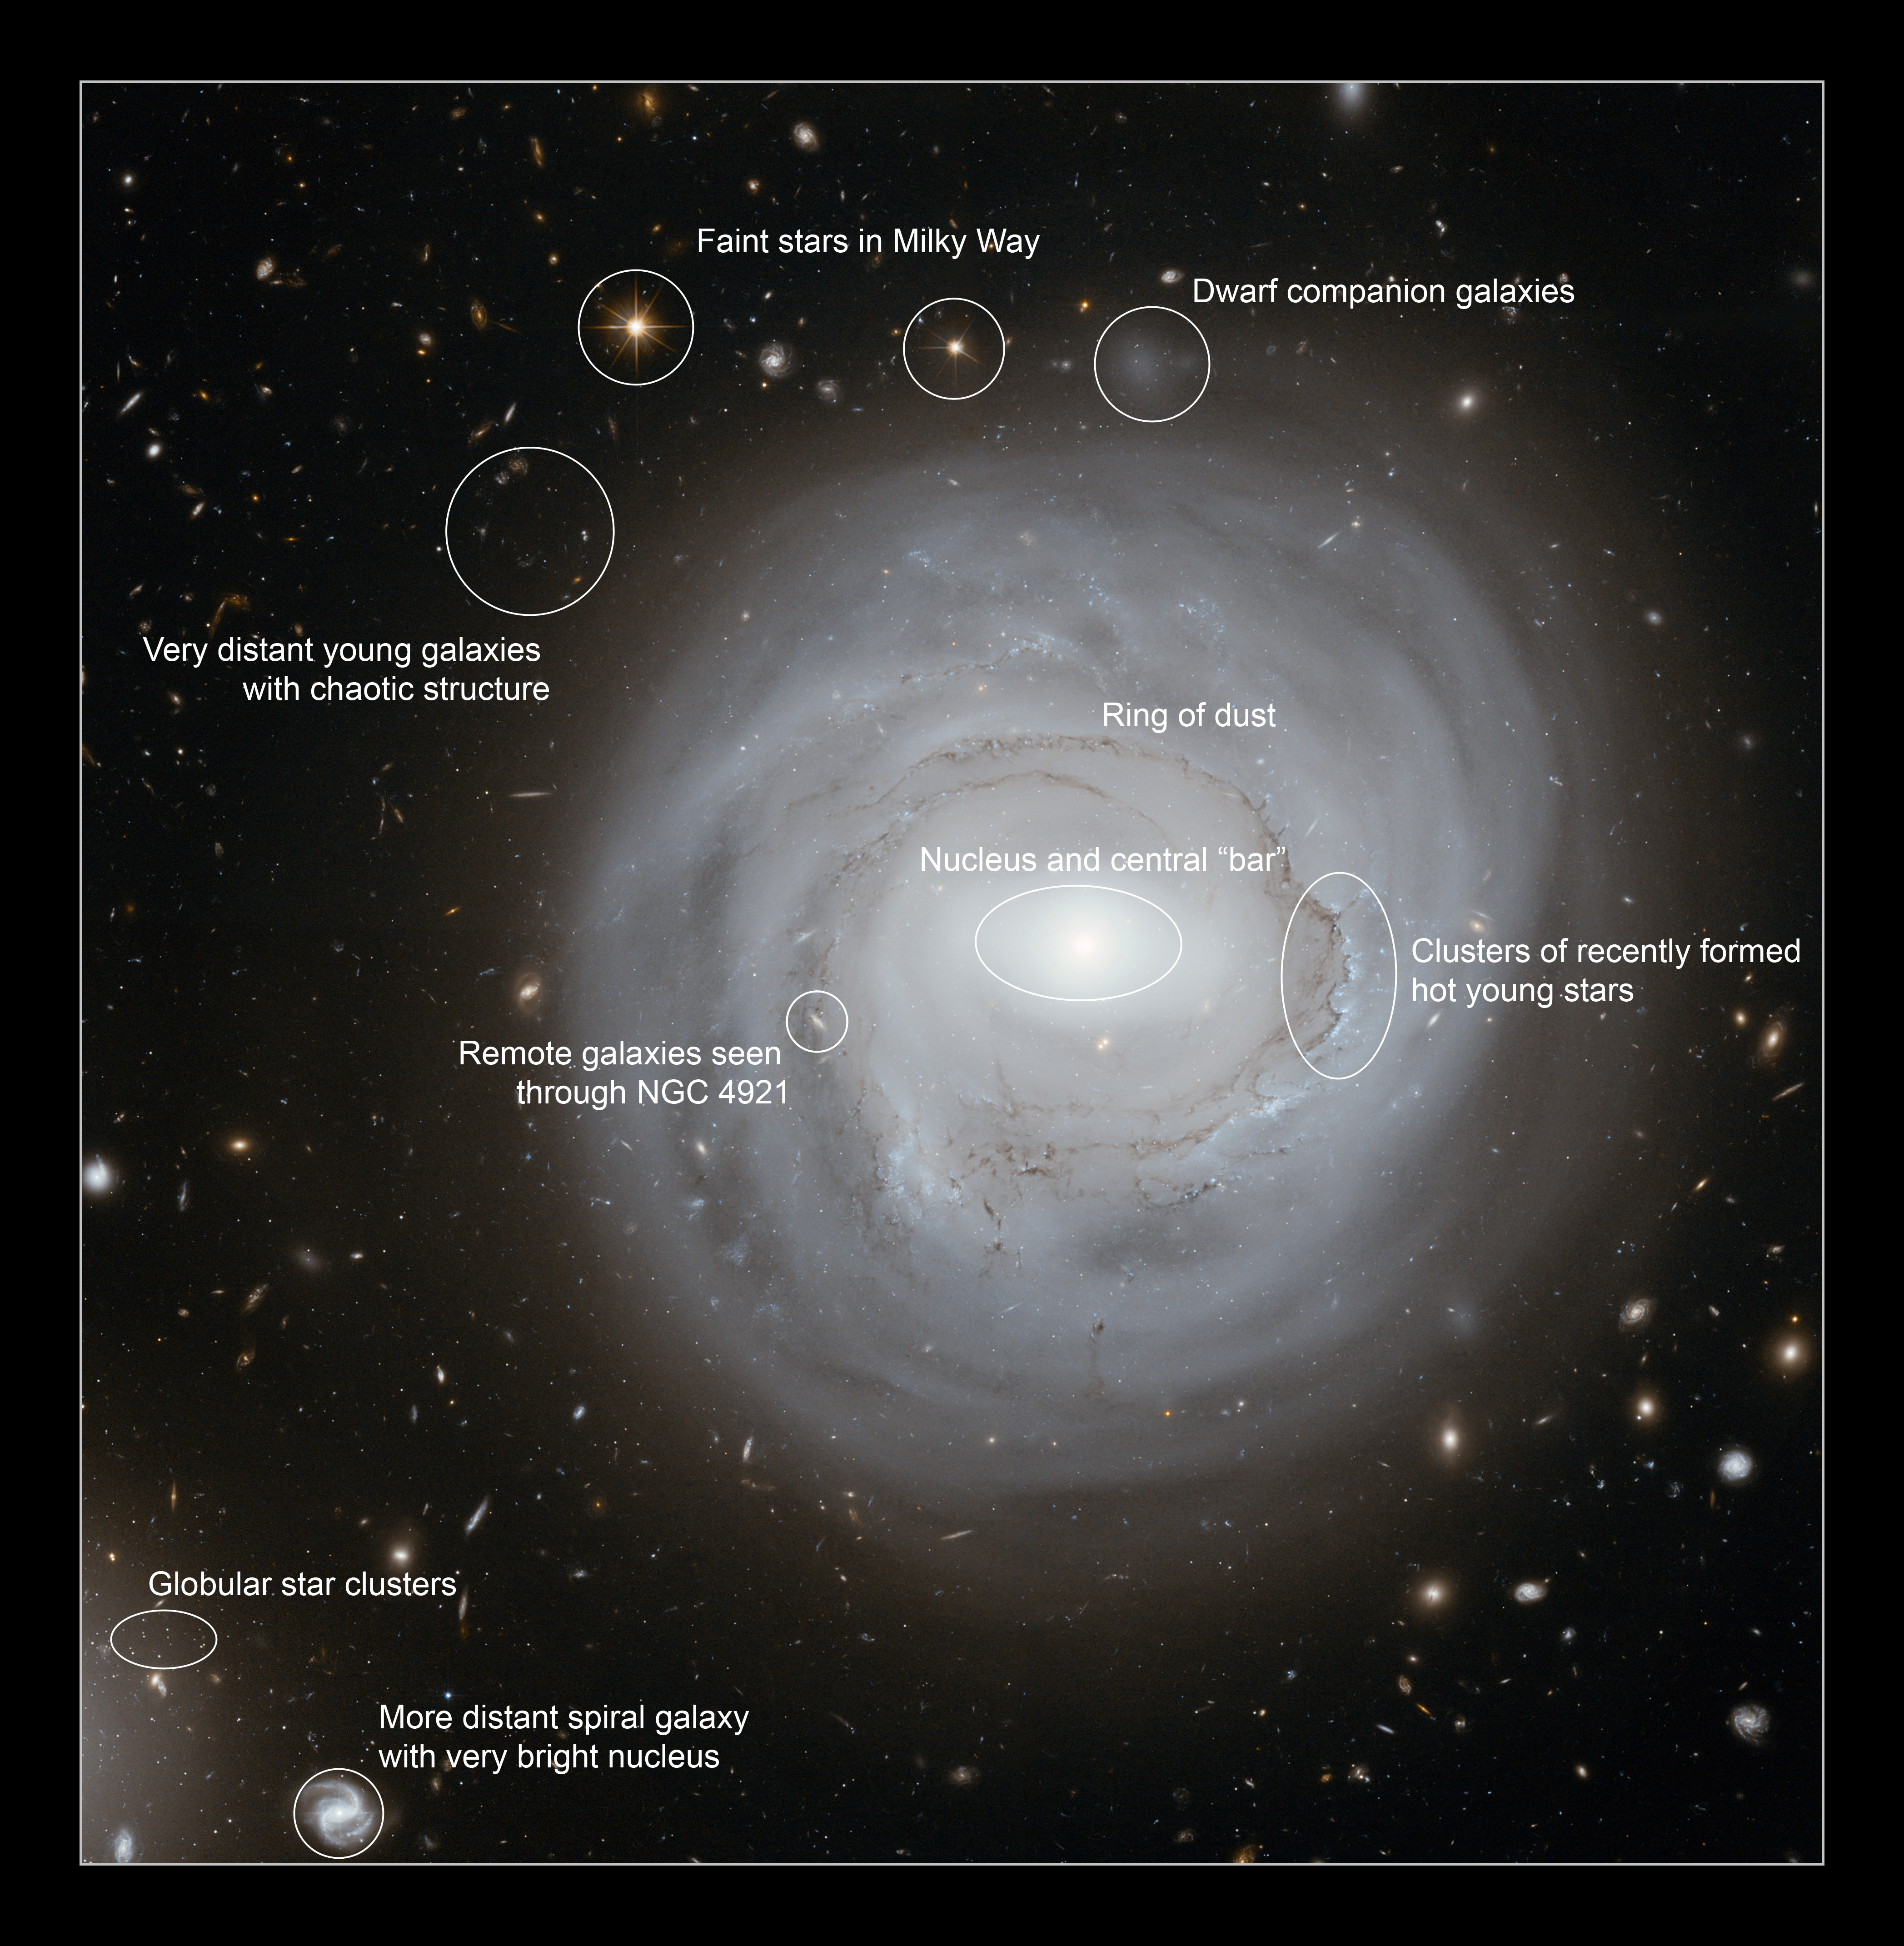

Annotated view of NGC 4921

Very deep NASA/ESA Hubble Space Telescope imaging of NGC 4921 with annotation to indictate the locations of some of the more interesting features of the galaxy and its surroundings.

Credit: NASA, ESA and K. Cook (Lawrence Livermore National Laboratory, USA)